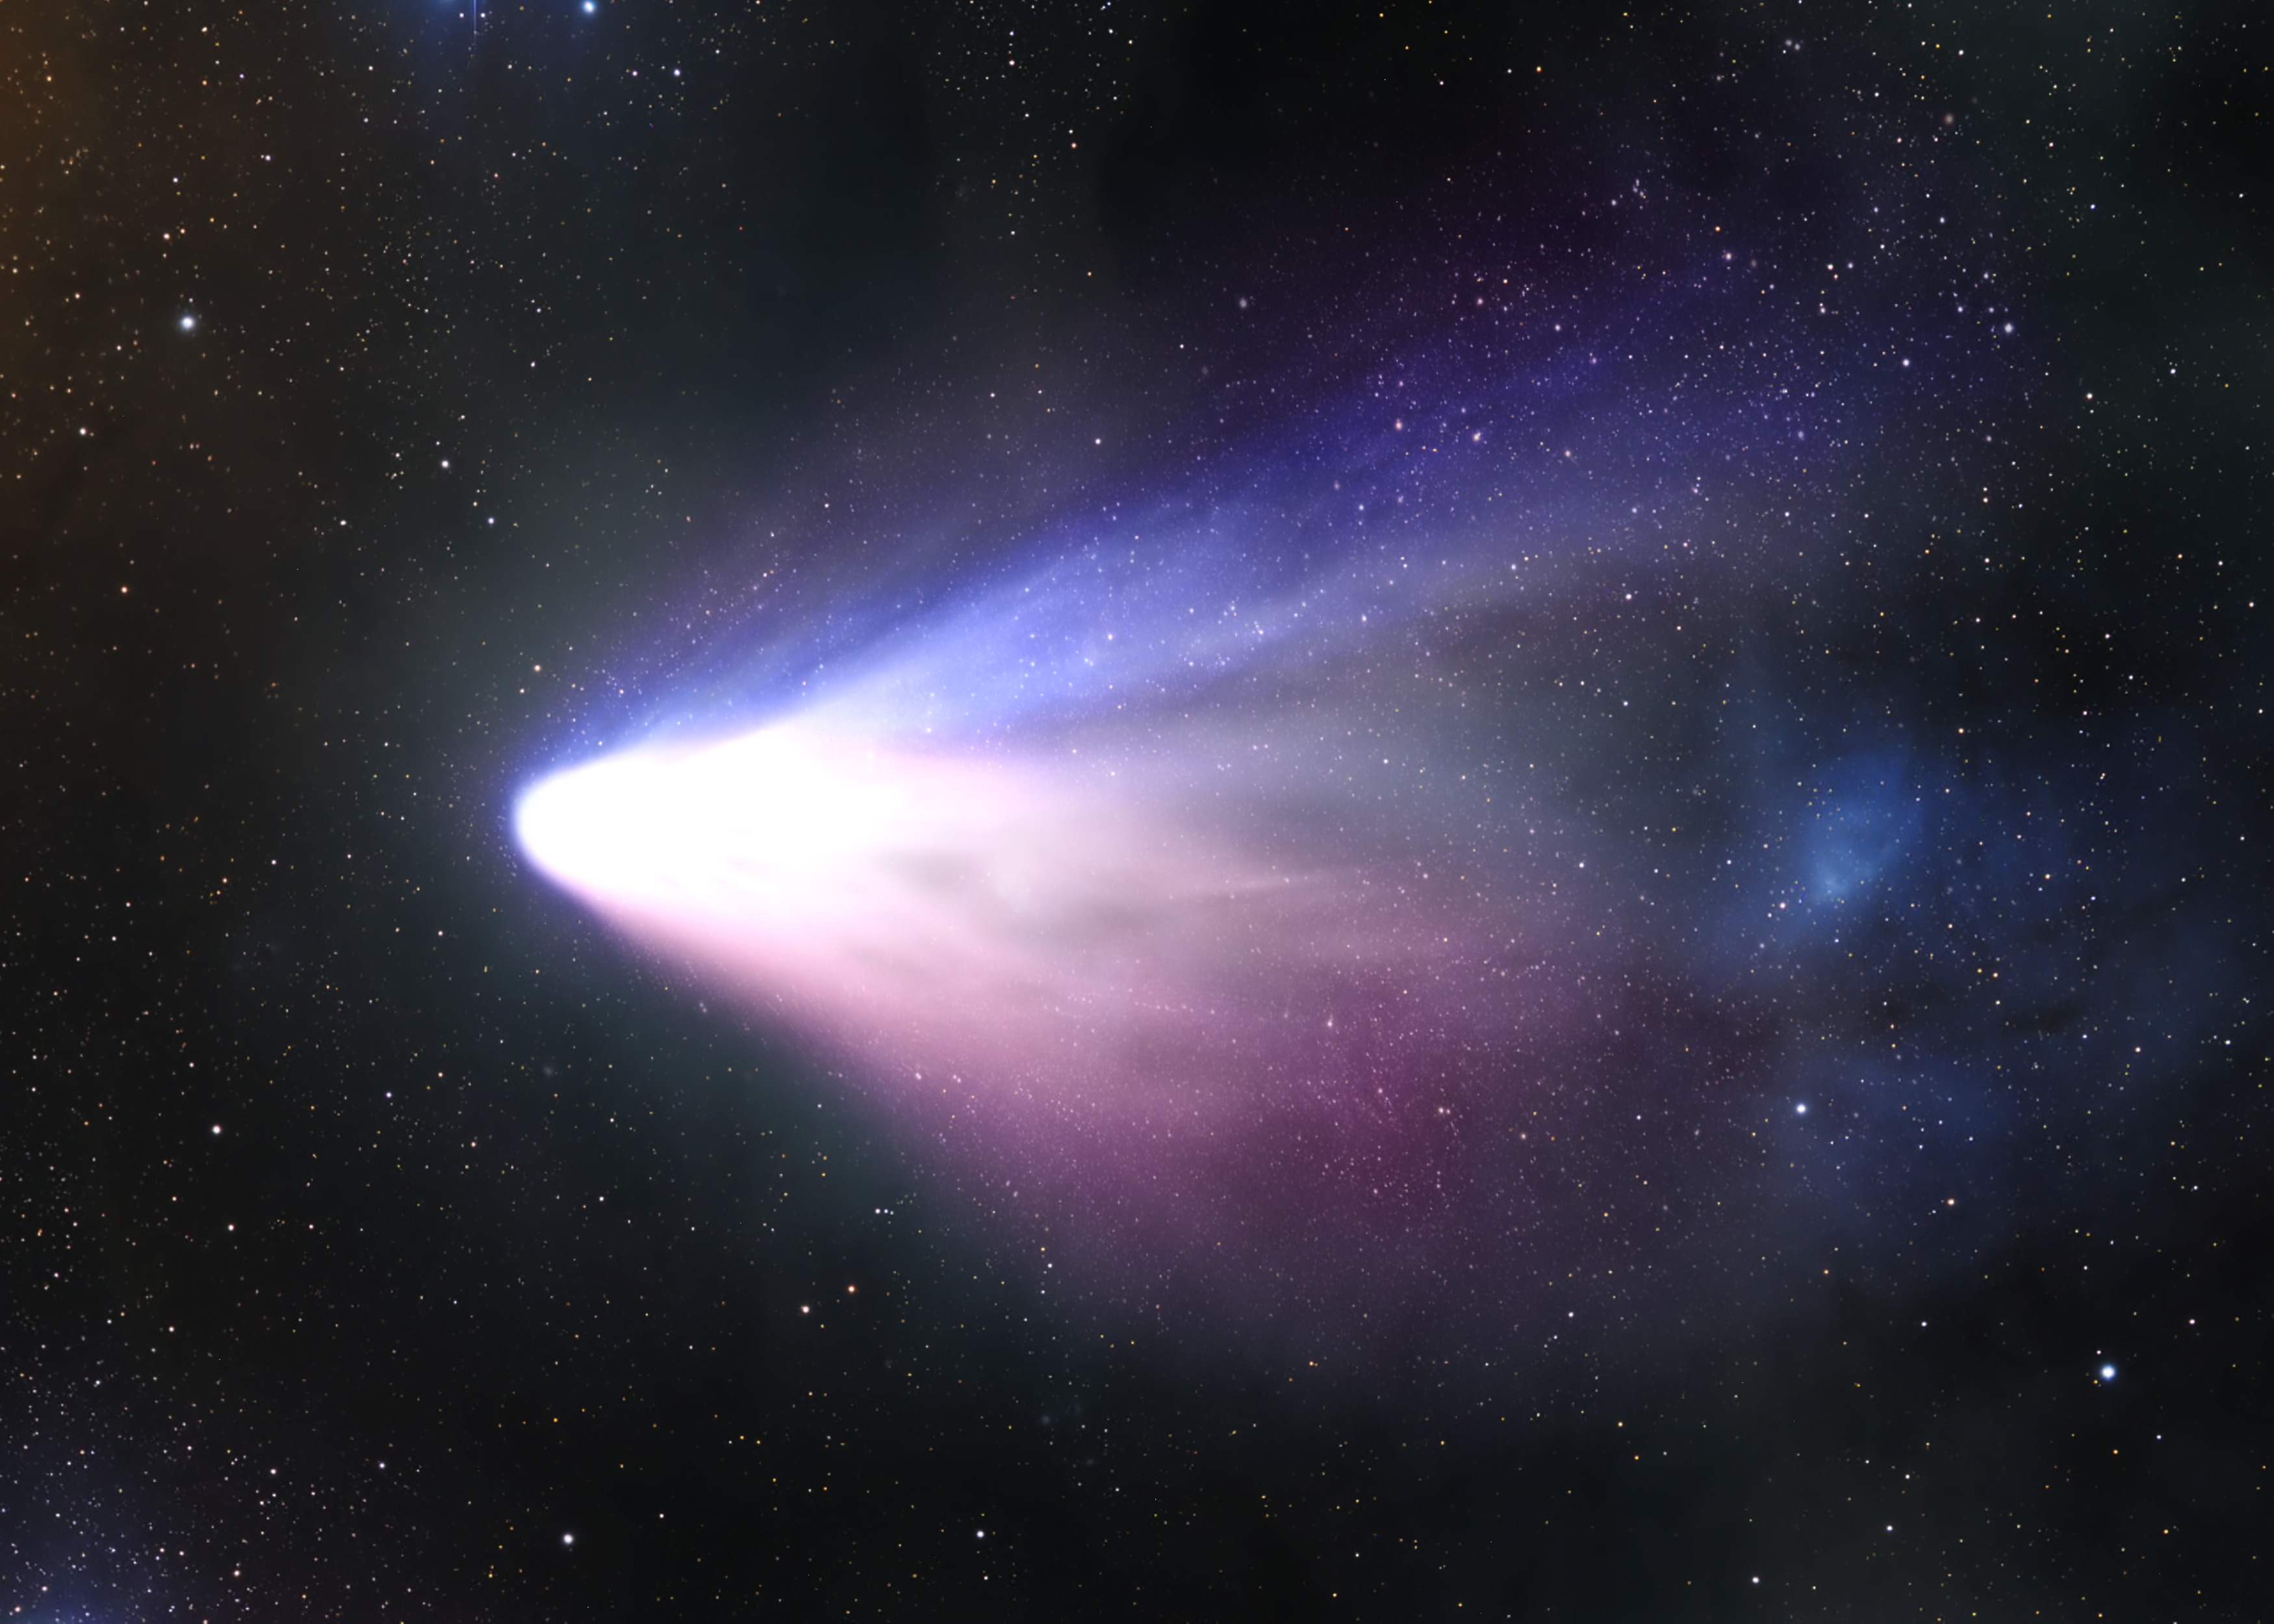

Comet Tempel 1 seen from the Distance [artist's impression]

Distant view of the Comet Tempel 1, target of NASA's Deep Impact mission (artist's impression).

Credit: ESA & NASA